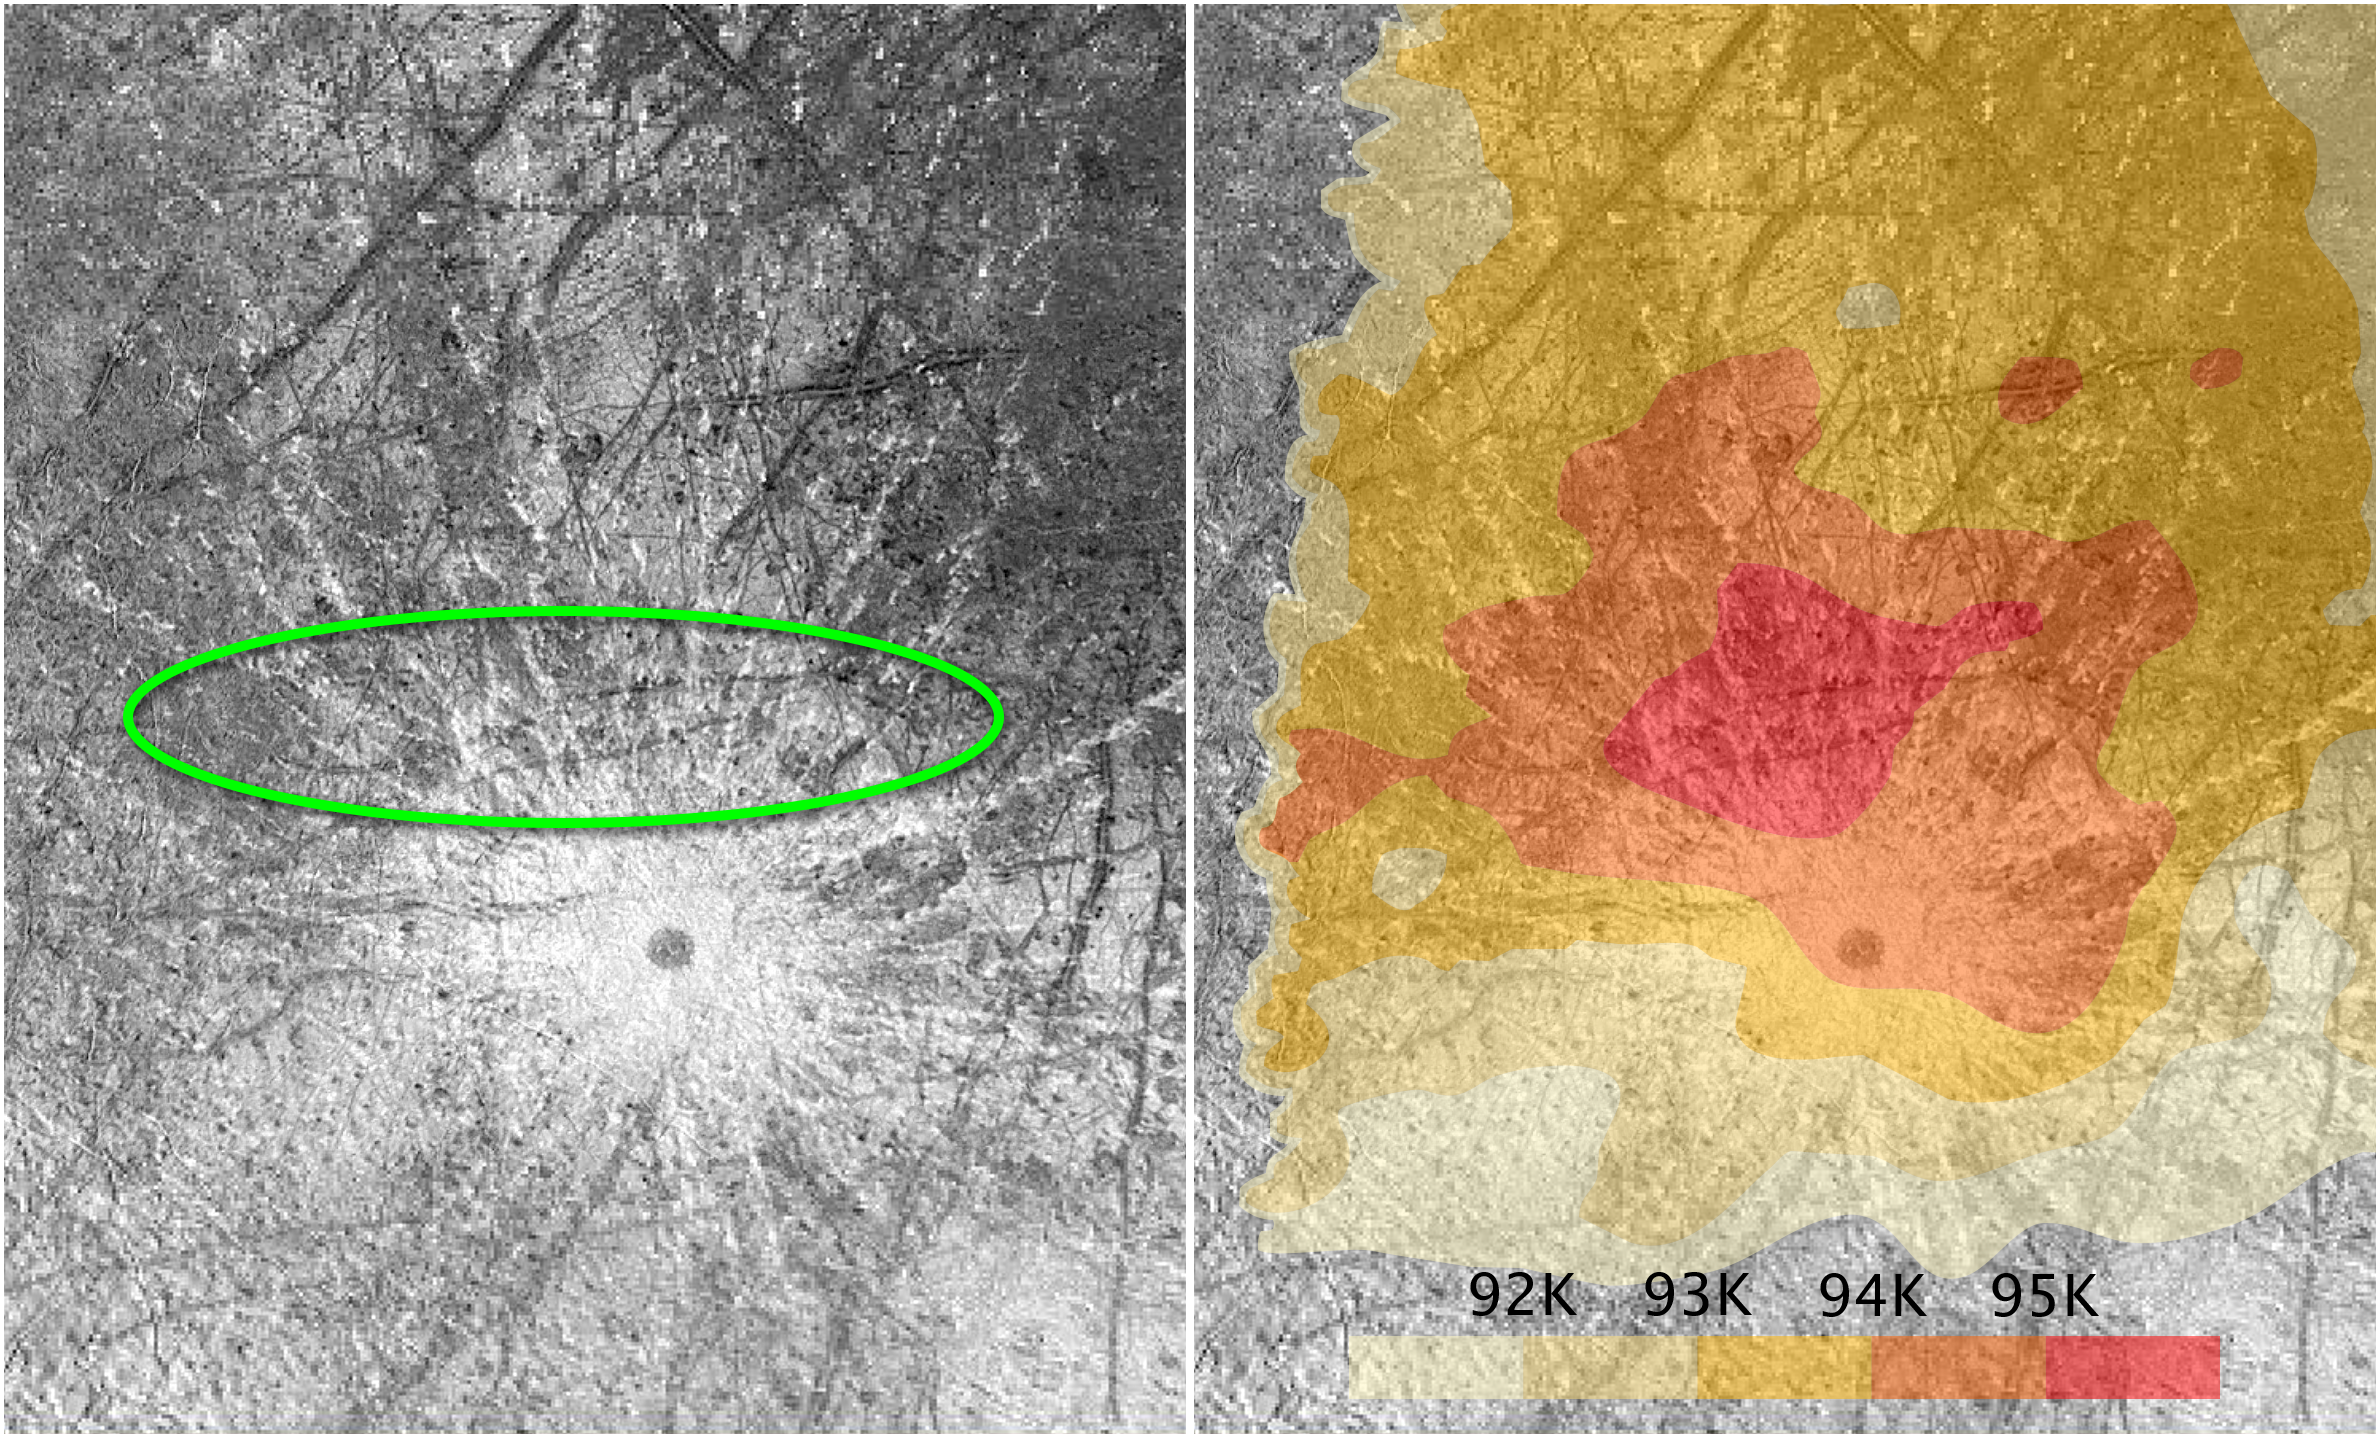

Europa's plumes located near warm spot

These images of the surface of the Jovian moon Europa, taken by NASA's Galileo spacecraft, focus on a region of interest on the icy moon.

The image at left traces the location of the erupting plumes of material, observed by the NASA/ESA Hubble Space Telescope in 2014 and again in 2016. The plumes are located inside the area surrounded by the green oval. The green oval also corresponds to a warm region on Europa's surface, as identified by the temperature map at right. The map is based on observations by the Galileo spacecraft. The warmest area is colored bright red.

Researchers speculate these data offer circumstantial evidence for unusual activity that may be related to a subsurface ocean on Europa. The dark circle just below center in both images is a crater and is not thought to be related to the warm spot or the plume activity.

Credit: NASA, ESA, W. Sparks (STScI), and the USGS Astrogeology Science Center